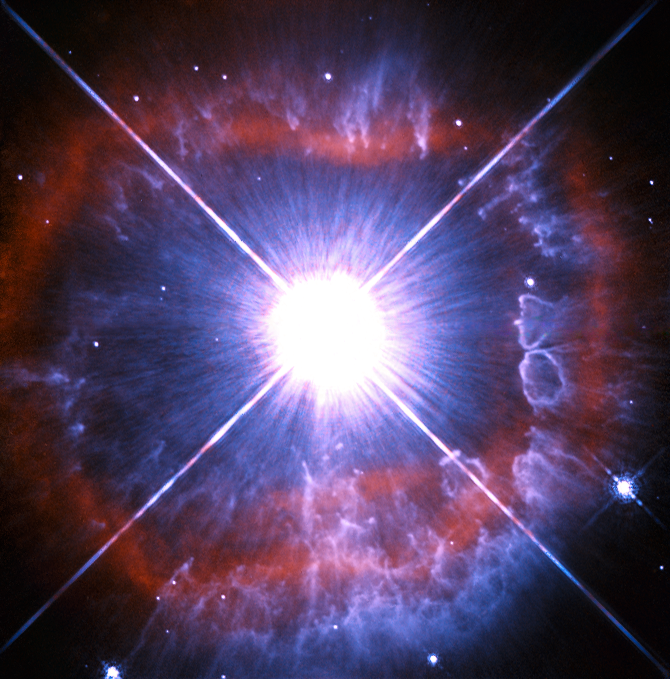

Snapshot of a shedding star

In this new Hubble image, the strikingly luminous star AG Carinae — otherwise known as HD 94910 — takes centre stage. Found within the constellation of Carina in the southern sky, AG Carinae lies 20 000 light-years away, nestled in the Milky Way.

AG Carinae is classified as a Luminous Blue Variable. These rare objects are massive evolved stars that will one day become Wolf-Rayet Stars — a class of stars that are tens of thousands to several million times as luminous as the Sun. They have evolved from main sequence stars that were twenty times the mass of the Sun.

Stars like AG Carinae lose their mass at a phenomenal rate. This loss of mass is due to powerful stellar winds with speeds of up to 7 million km/hour. These powerful winds are also responsible for the shroud of material visible in this image. The winds exert enormous pressure on the clouds of interstellar material expelled by the star and force them into this shape.

Despite HD 94910’s intense luminosity, it is not visible with the naked eye as much of its output is in the ultraviolet.

This image was taken with the Wide Field and Planetary Camera 2 (WFPC2), that was installed on Hubble during the Shuttle mission STS-61 and was Hubble’s workhorse for many years. It is worth noting that the bright glare at the centre of the image is not the star itself. The star is tiny at this scale and hidden within the saturated region. The white cross is also not an astronomical phenomenon but rather an effect of the telescope.

Credit: ESA/Hubble & NASA